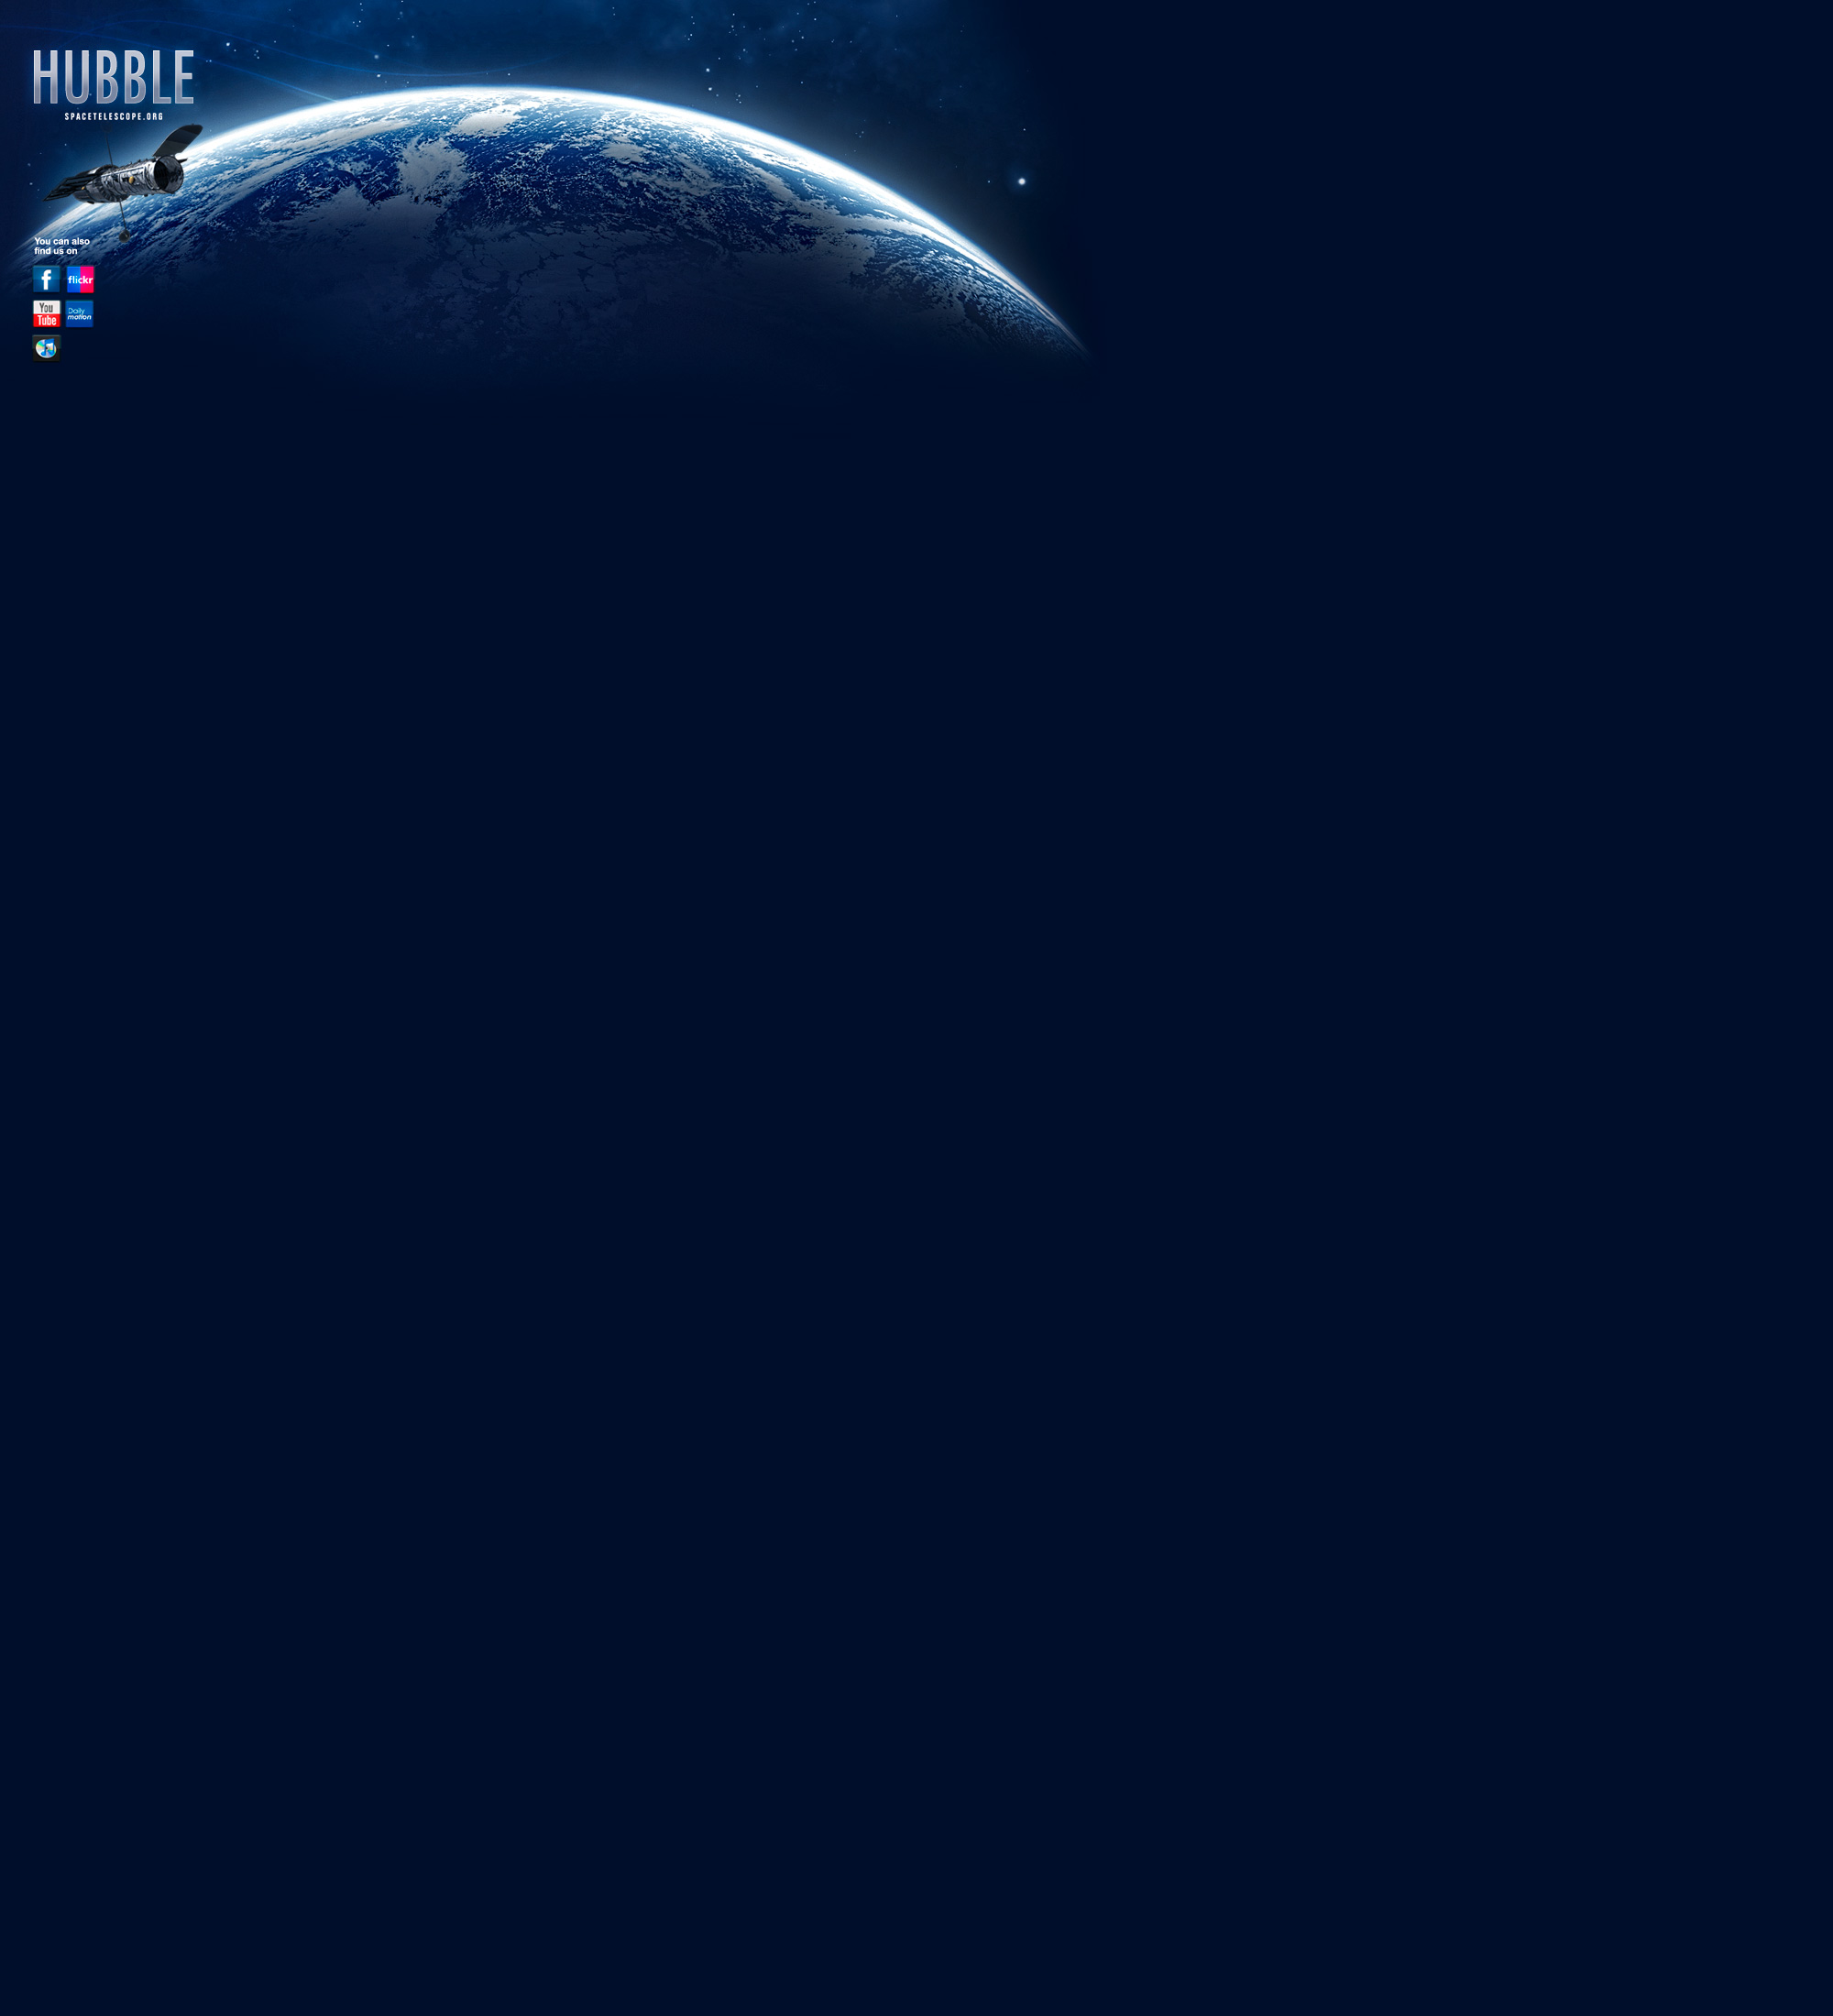

Hubble background for MySpace

Hubble background image for MySpace.

Credit: NASA & ESA